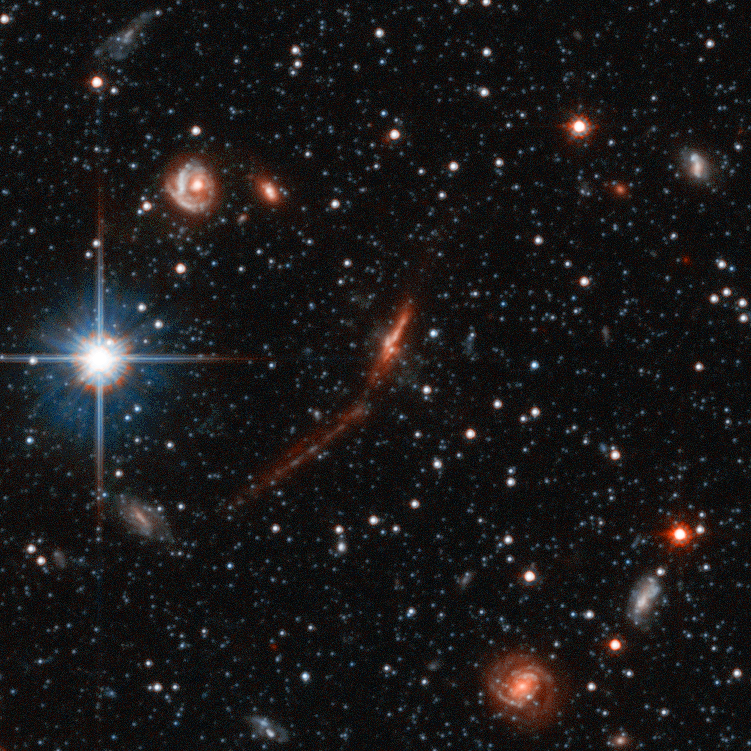

Andromeda Galaxy Halo Details - 2

Relying on the deepest visible-light images ever taken in space, astronomers using NASA's Hubble Space Telescope (HST) have reliably measured the age of the spherical halo of stars surrounding the neighboring Andromeda galaxy (M31). To their surprise, they have discovered that approximately one-third of the stars in Andromeda's halo formed only 6 to 8 billion years ago. That's a far cry from the 11-to-13 billion-year age of the stars in the Milky Way's halo.

Credit: NASA, ESA and T.M. Brown (STScI)